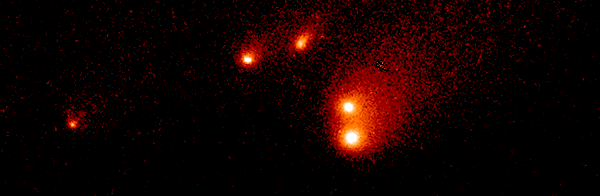

Comet P/Shoemaker-Levy 9

The "gang of four" comet fragments, belonging to the P-group of Shoemaker-Levy 9, en route to its collision with Jupiter.

Credit: NASA & ESA